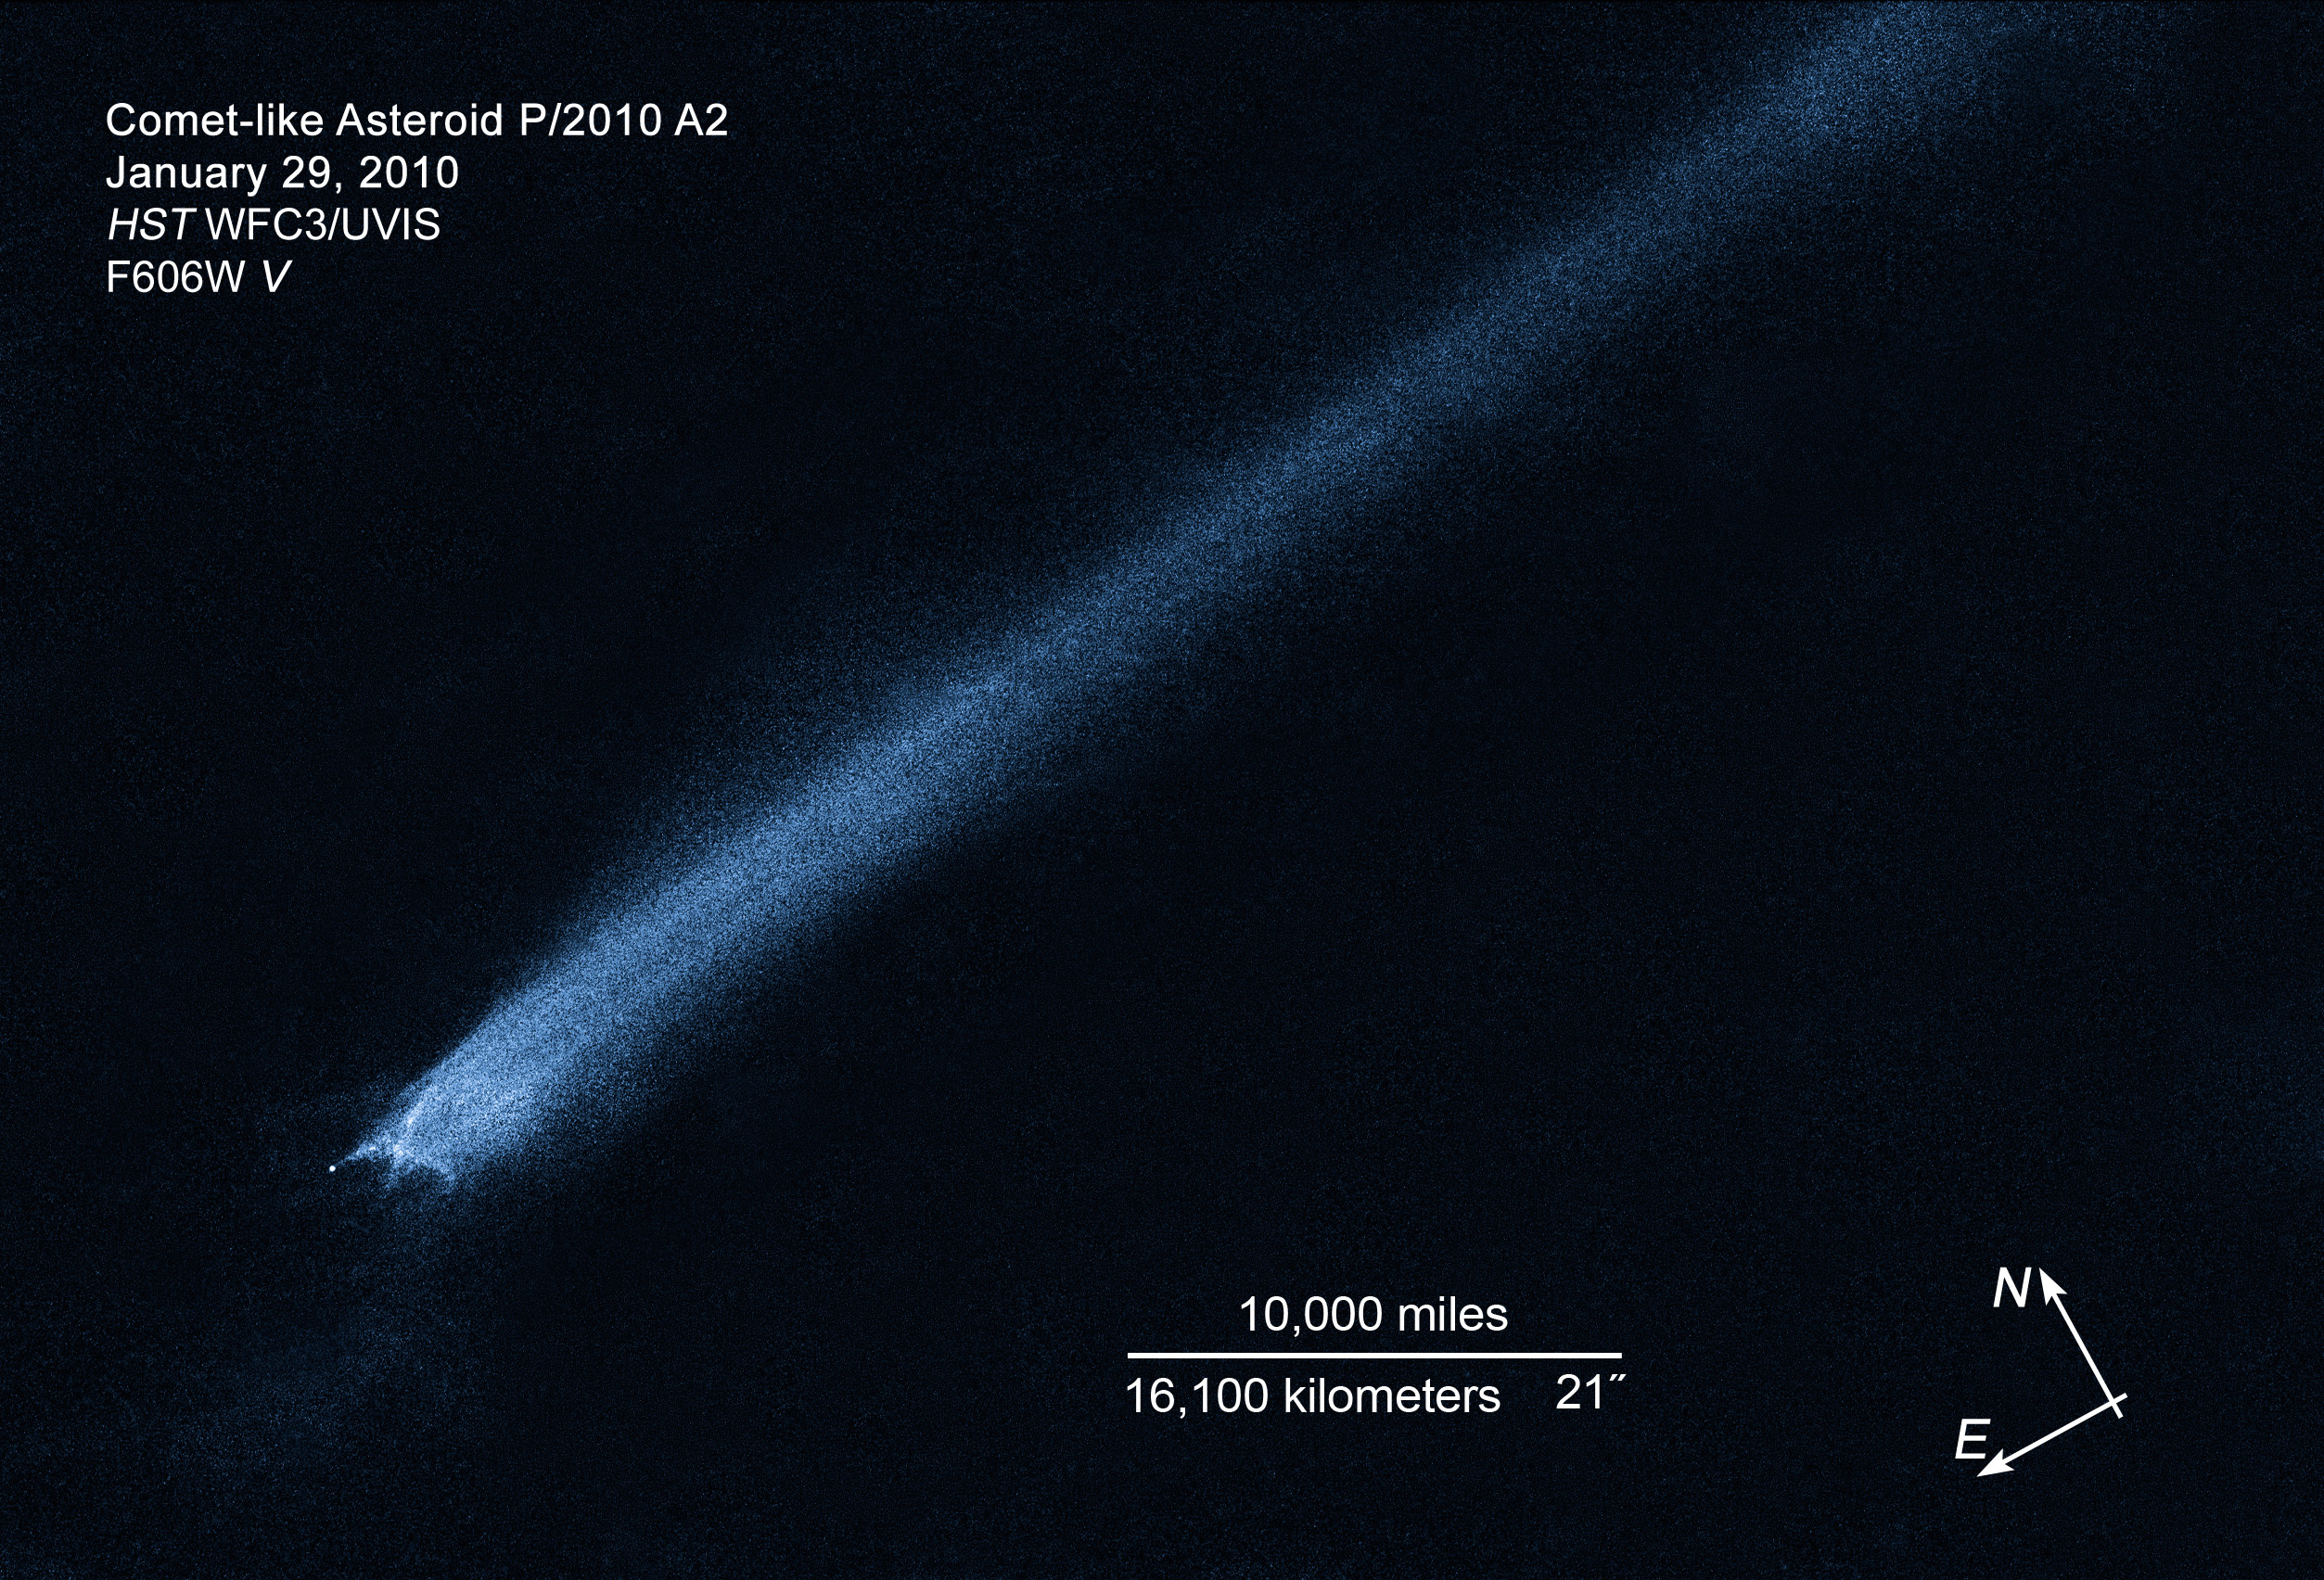

Compass and scale image for comet-like asteroid P/2010 A2

Compass and scale image for comet-like asteroid P/2010 A2.

Credit: NASA, ESA and D. Jewitt (UCLA)